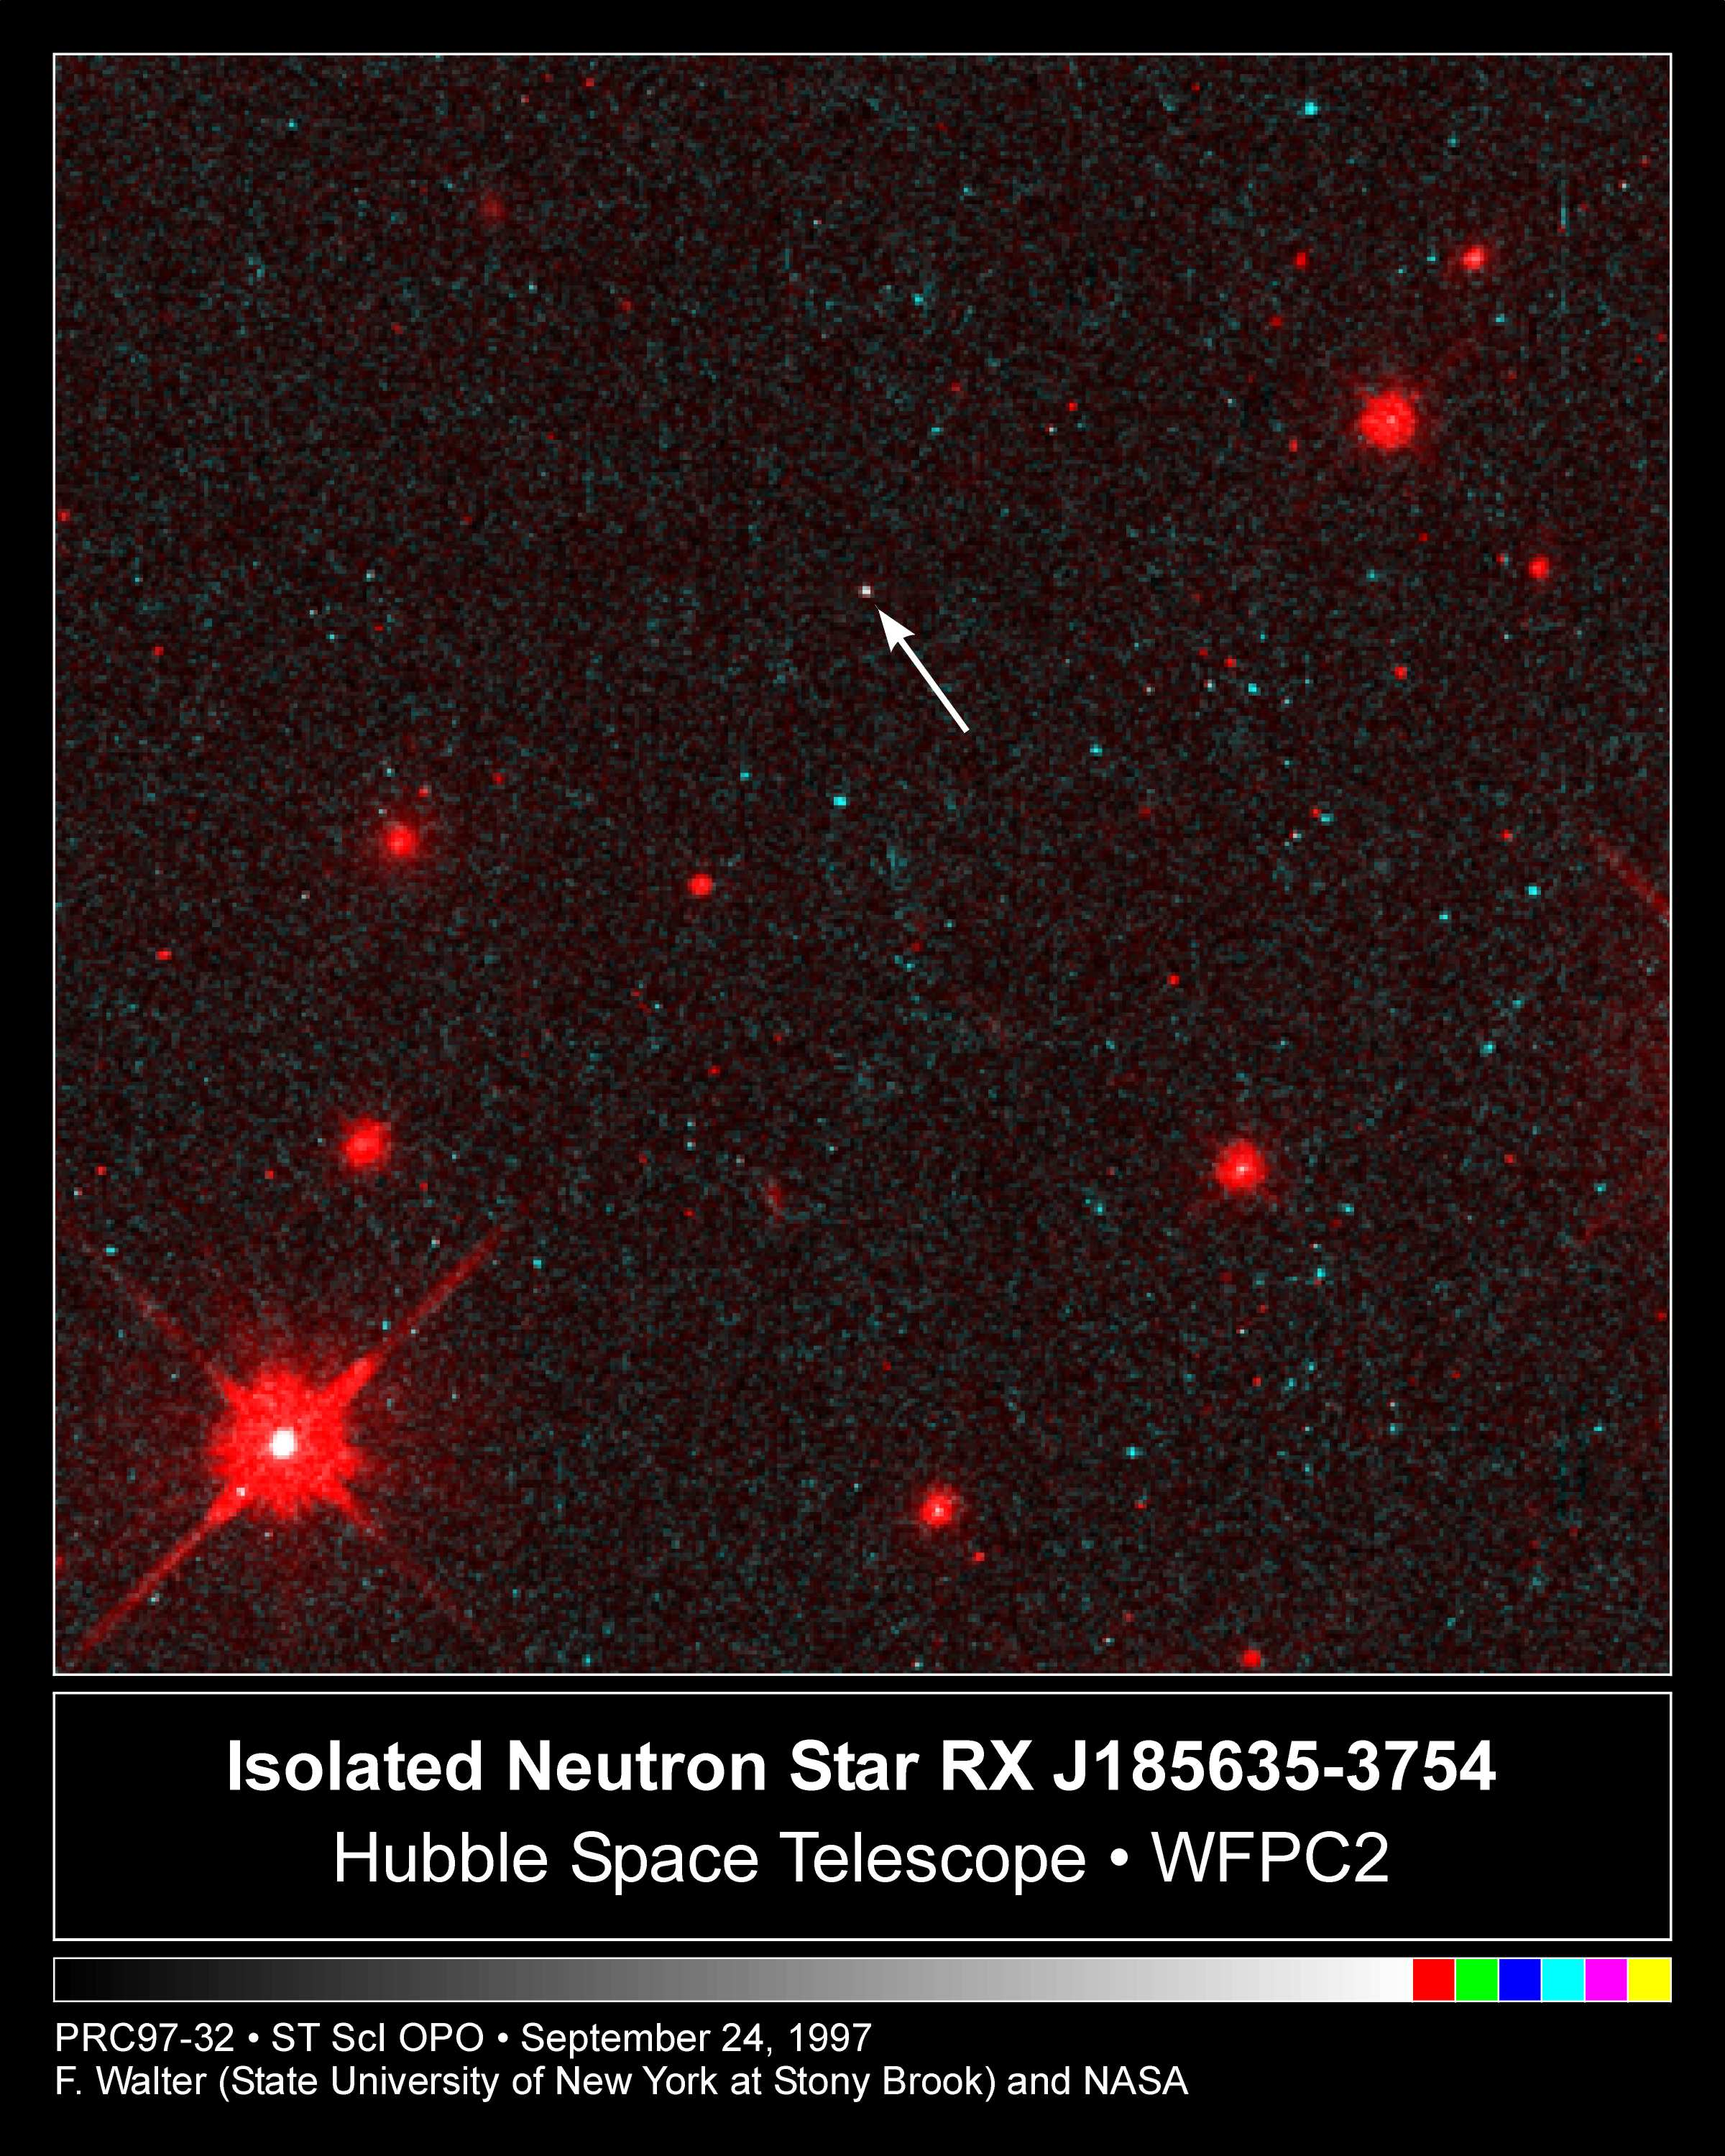

Hubble Sees a Neutron Star Alone in Space

This is the first direct look, in visible light, at a lone neutronstar, as seen by NASA/ESA Hubble Space Telescope. The Hubble results show thestar is very hot (1.2 million degrees Fahrenheit or about 670 thousand degrees Celsius at the surface), and can be no larger than 16.8 miles (28 kilometers) across. These resultsprove that the object must be a neutron star, because no other knowntype of object can be this hot, small, and dim (below 25th magnitude).

The first clue that there was a neutron star at this location came in1992, when the ROSAT (the Roentgen Satellite) found a bright X-ray source without any optical counterpart in optical sky surveys. Hubble's Wide Field Planetary Camera 2 was used in October 1996 to undertake asensitive search for the optical object, and found a stellar pinpointof light within only 2 arc seconds (1/900th the diameter of the Moon) ofthe X-ray position. Astronomers haven't directly measured the neutronstar's distance, but fortunately the neutron star lies in front of amolecular cloud known to be about 400 light-years away in the southernconstellation Corona Australis.

Credit: Fred Walter (State University of New York at Stony Brook) and NASA/ESA